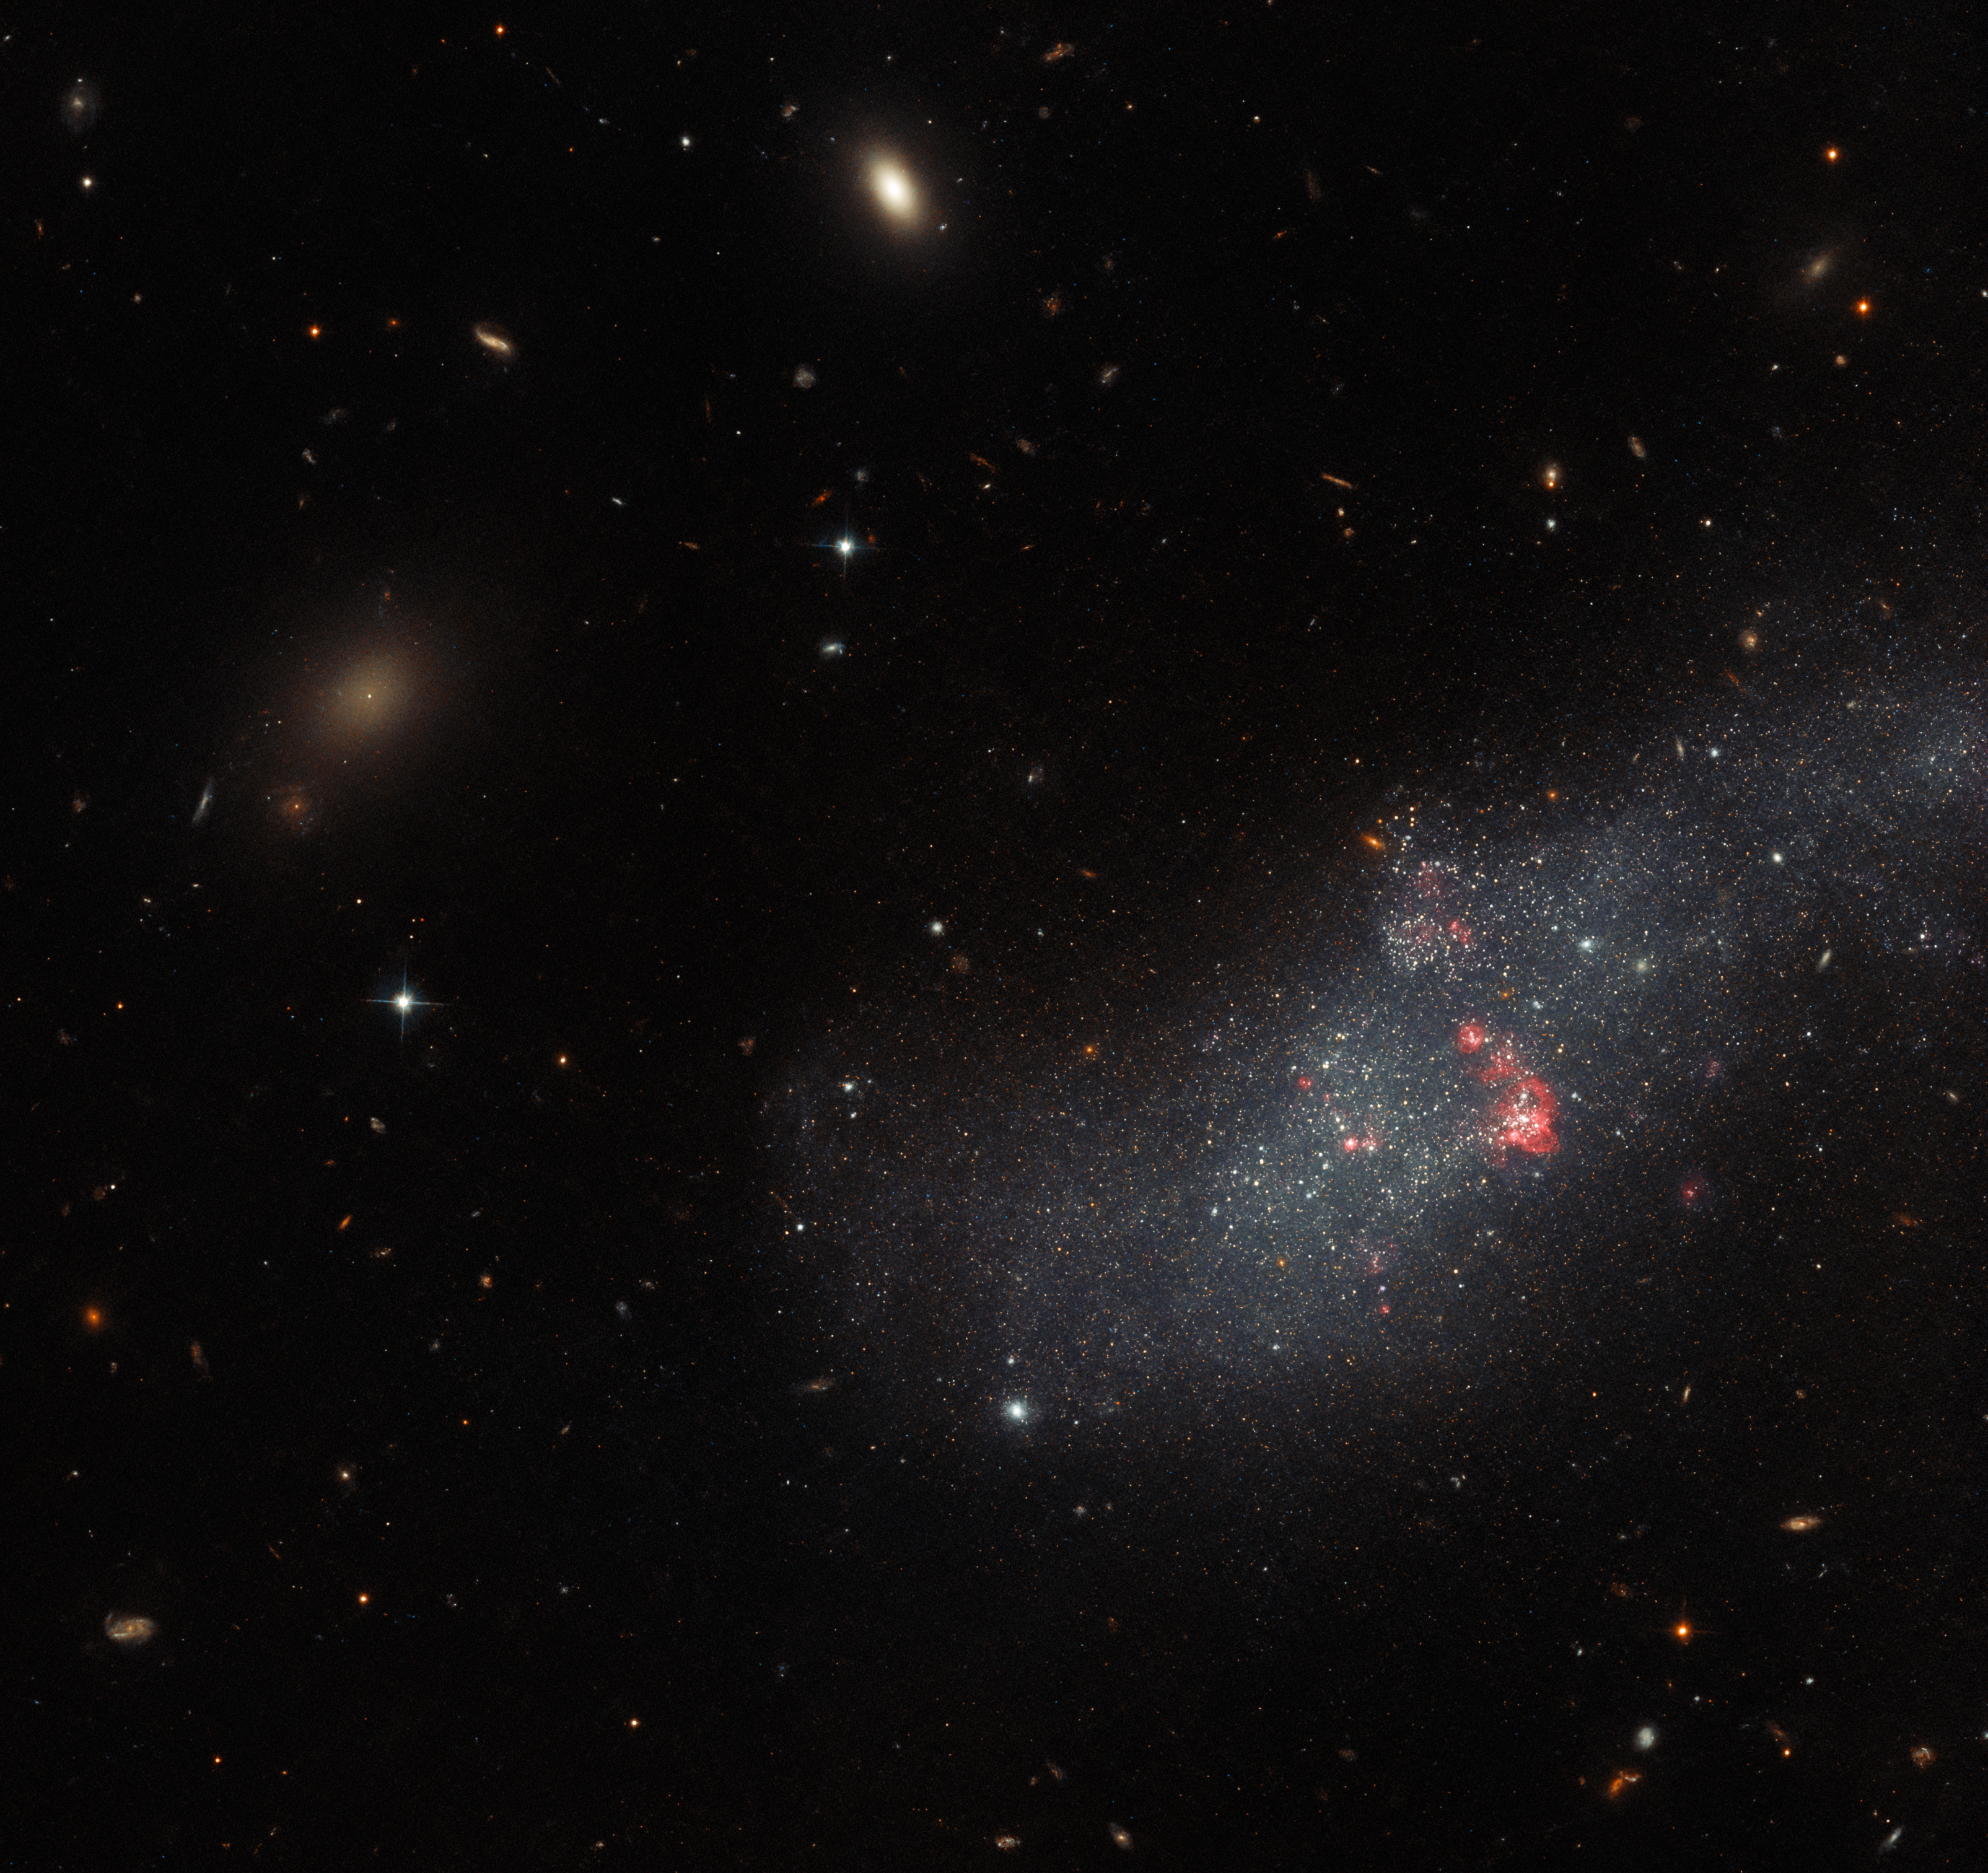

Hubble’s neighbourhood watch

UGCA 307 hangs against an irregular backdrop of distant galaxies in this image from the NASA/ESA Hubble Space Telescope. The small galaxy consists of a diffuse band of stars containing red bubbles of gas that mark regions of recent star formation, and lies roughly 26 million light-years from Earth in the constellation Corvus. Appearing as just a small patch of stars, UGCA 307 is a diminutive dwarf galaxy without a defined structure — resembling nothing more than a hazy patch of passing cloud.

This image is part of a Hubble project to explore every known nearby galaxy, giving astronomers insights into our galactic neighbourhood. Before this set of observations, almost three quarters of nearby galaxies had been investigated by Hubble in enough detail to spot the brightest stars and build up an understanding of the stars populating each galaxy. This Hubble project set out to explore the remaining quarter of nearby galaxies by taking advantage of short gaps in Hubble’s observing schedule.

This crystal-clear image was captured by Hubble’s Advanced Camera for Surveys (ACS), which was installed on the telescope in 2002 during Servicing Mission 3B. Hubble’s vantage point in low Earth orbit means that it is above atmospheric turbulence, giving it a sharper view of the Universe. However, it is also close enough to Earth that astronauts could visit the telescope to repair and refurbish the telescope. In total, five Space Shuttle missions flew to Hubble and kept it at the forefront of astronomy by installing new instruments. The ACS replaced one of Hubble’s original instruments, the Faint Object Camera, which was built by ESA.

Credit: ESA/Hubble & NASA, R. Tully